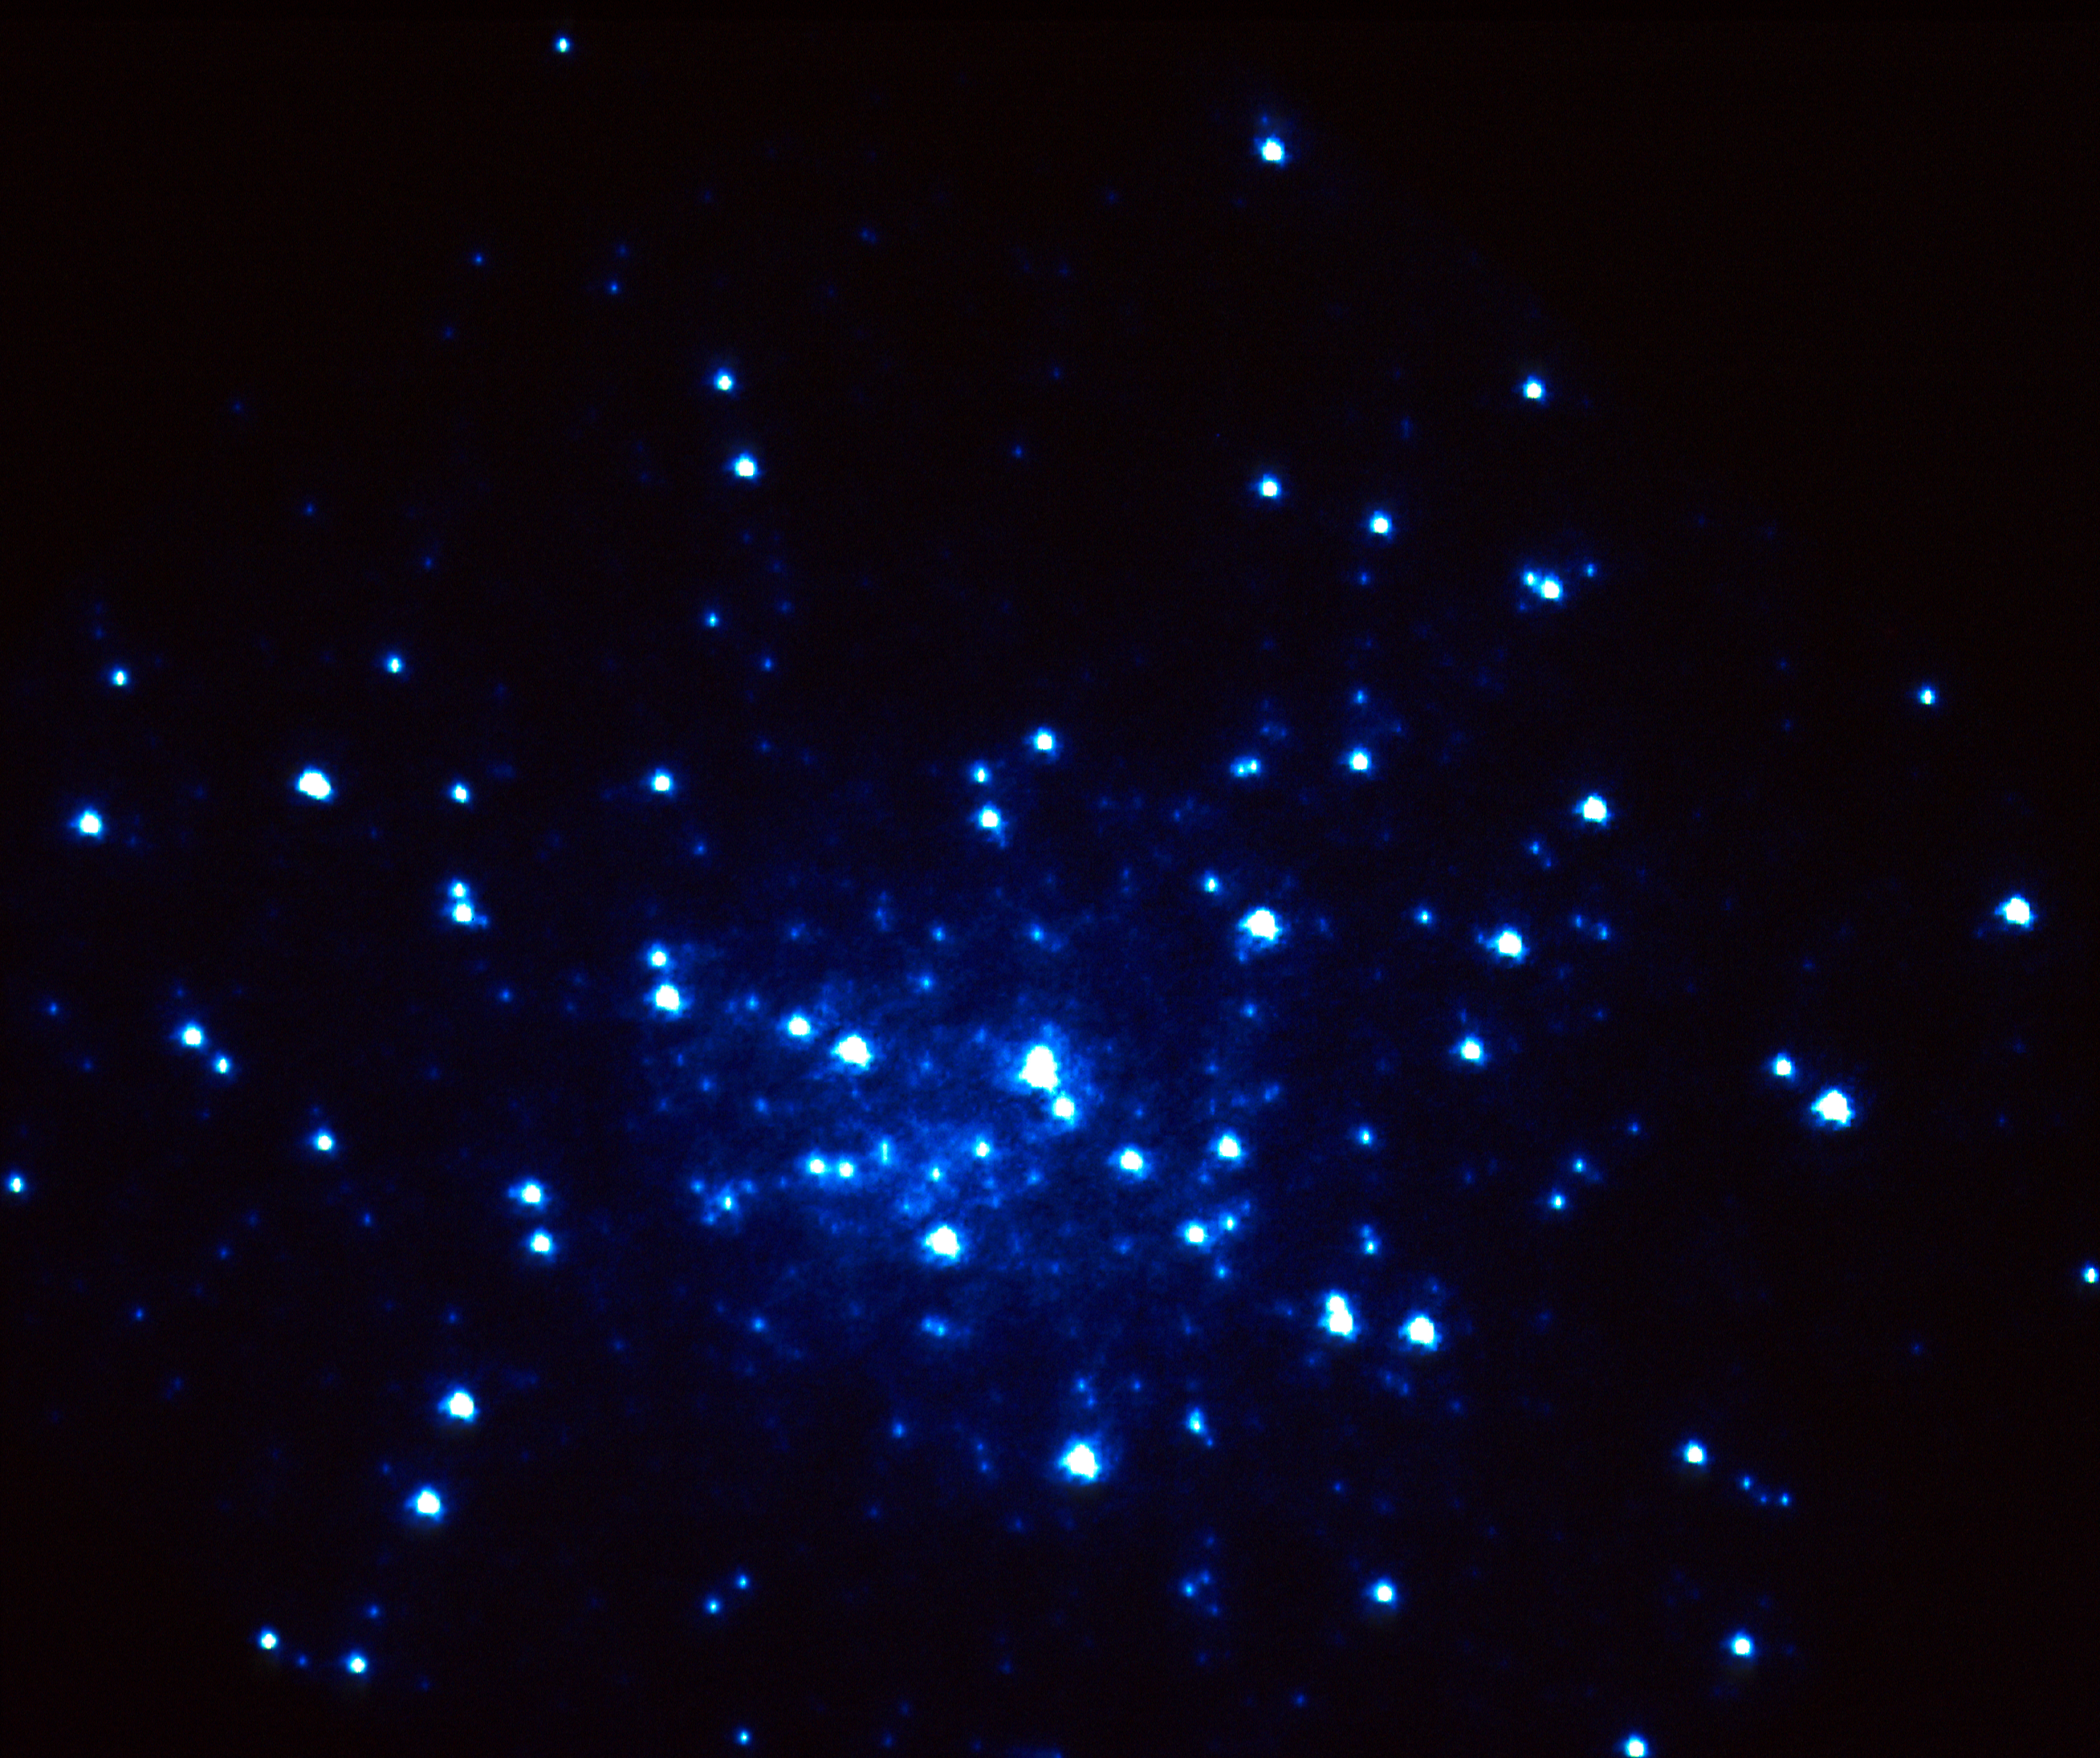

HST image of hot blue stars at the core of M15

A NASA/ESA Hubble Space Telescope (HST) image of the center of globular cluster M15 reveals a new population of about 15 very hot stars isolated at the core.

The most likely explanation for their existence is that they are the 'naked cores' of stars that have been stripped of their outer envelope of gas. This could only have happened if stars were so crowded together in the cluster's core they can gravitationally pull material form each other.

Credit: G. De Marchi (STScI and Univ. of Florence, Italy) and F. Paresce (STScI)/NASA, ESA.